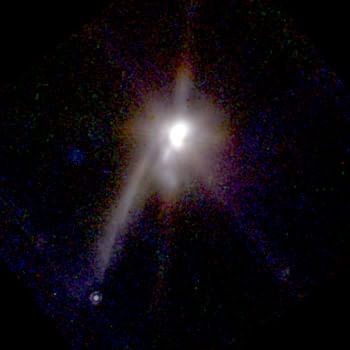

Object TMR-1C

Follow-up observations of an unusual object initially suspected to be the first directly detected planet outside our solar system have shown that the object is too hot to be a planet. Astronomers now believe it is more likely that the strange object is a background star whose light has been dimmed and reddened by interstellar dust, giving the illusion that it is in the vicinity of the double star system in which it was initially believed to have been a planet.

Credit: Susan Terebey (Extrasolar Research Corp.), and NASA/ESA